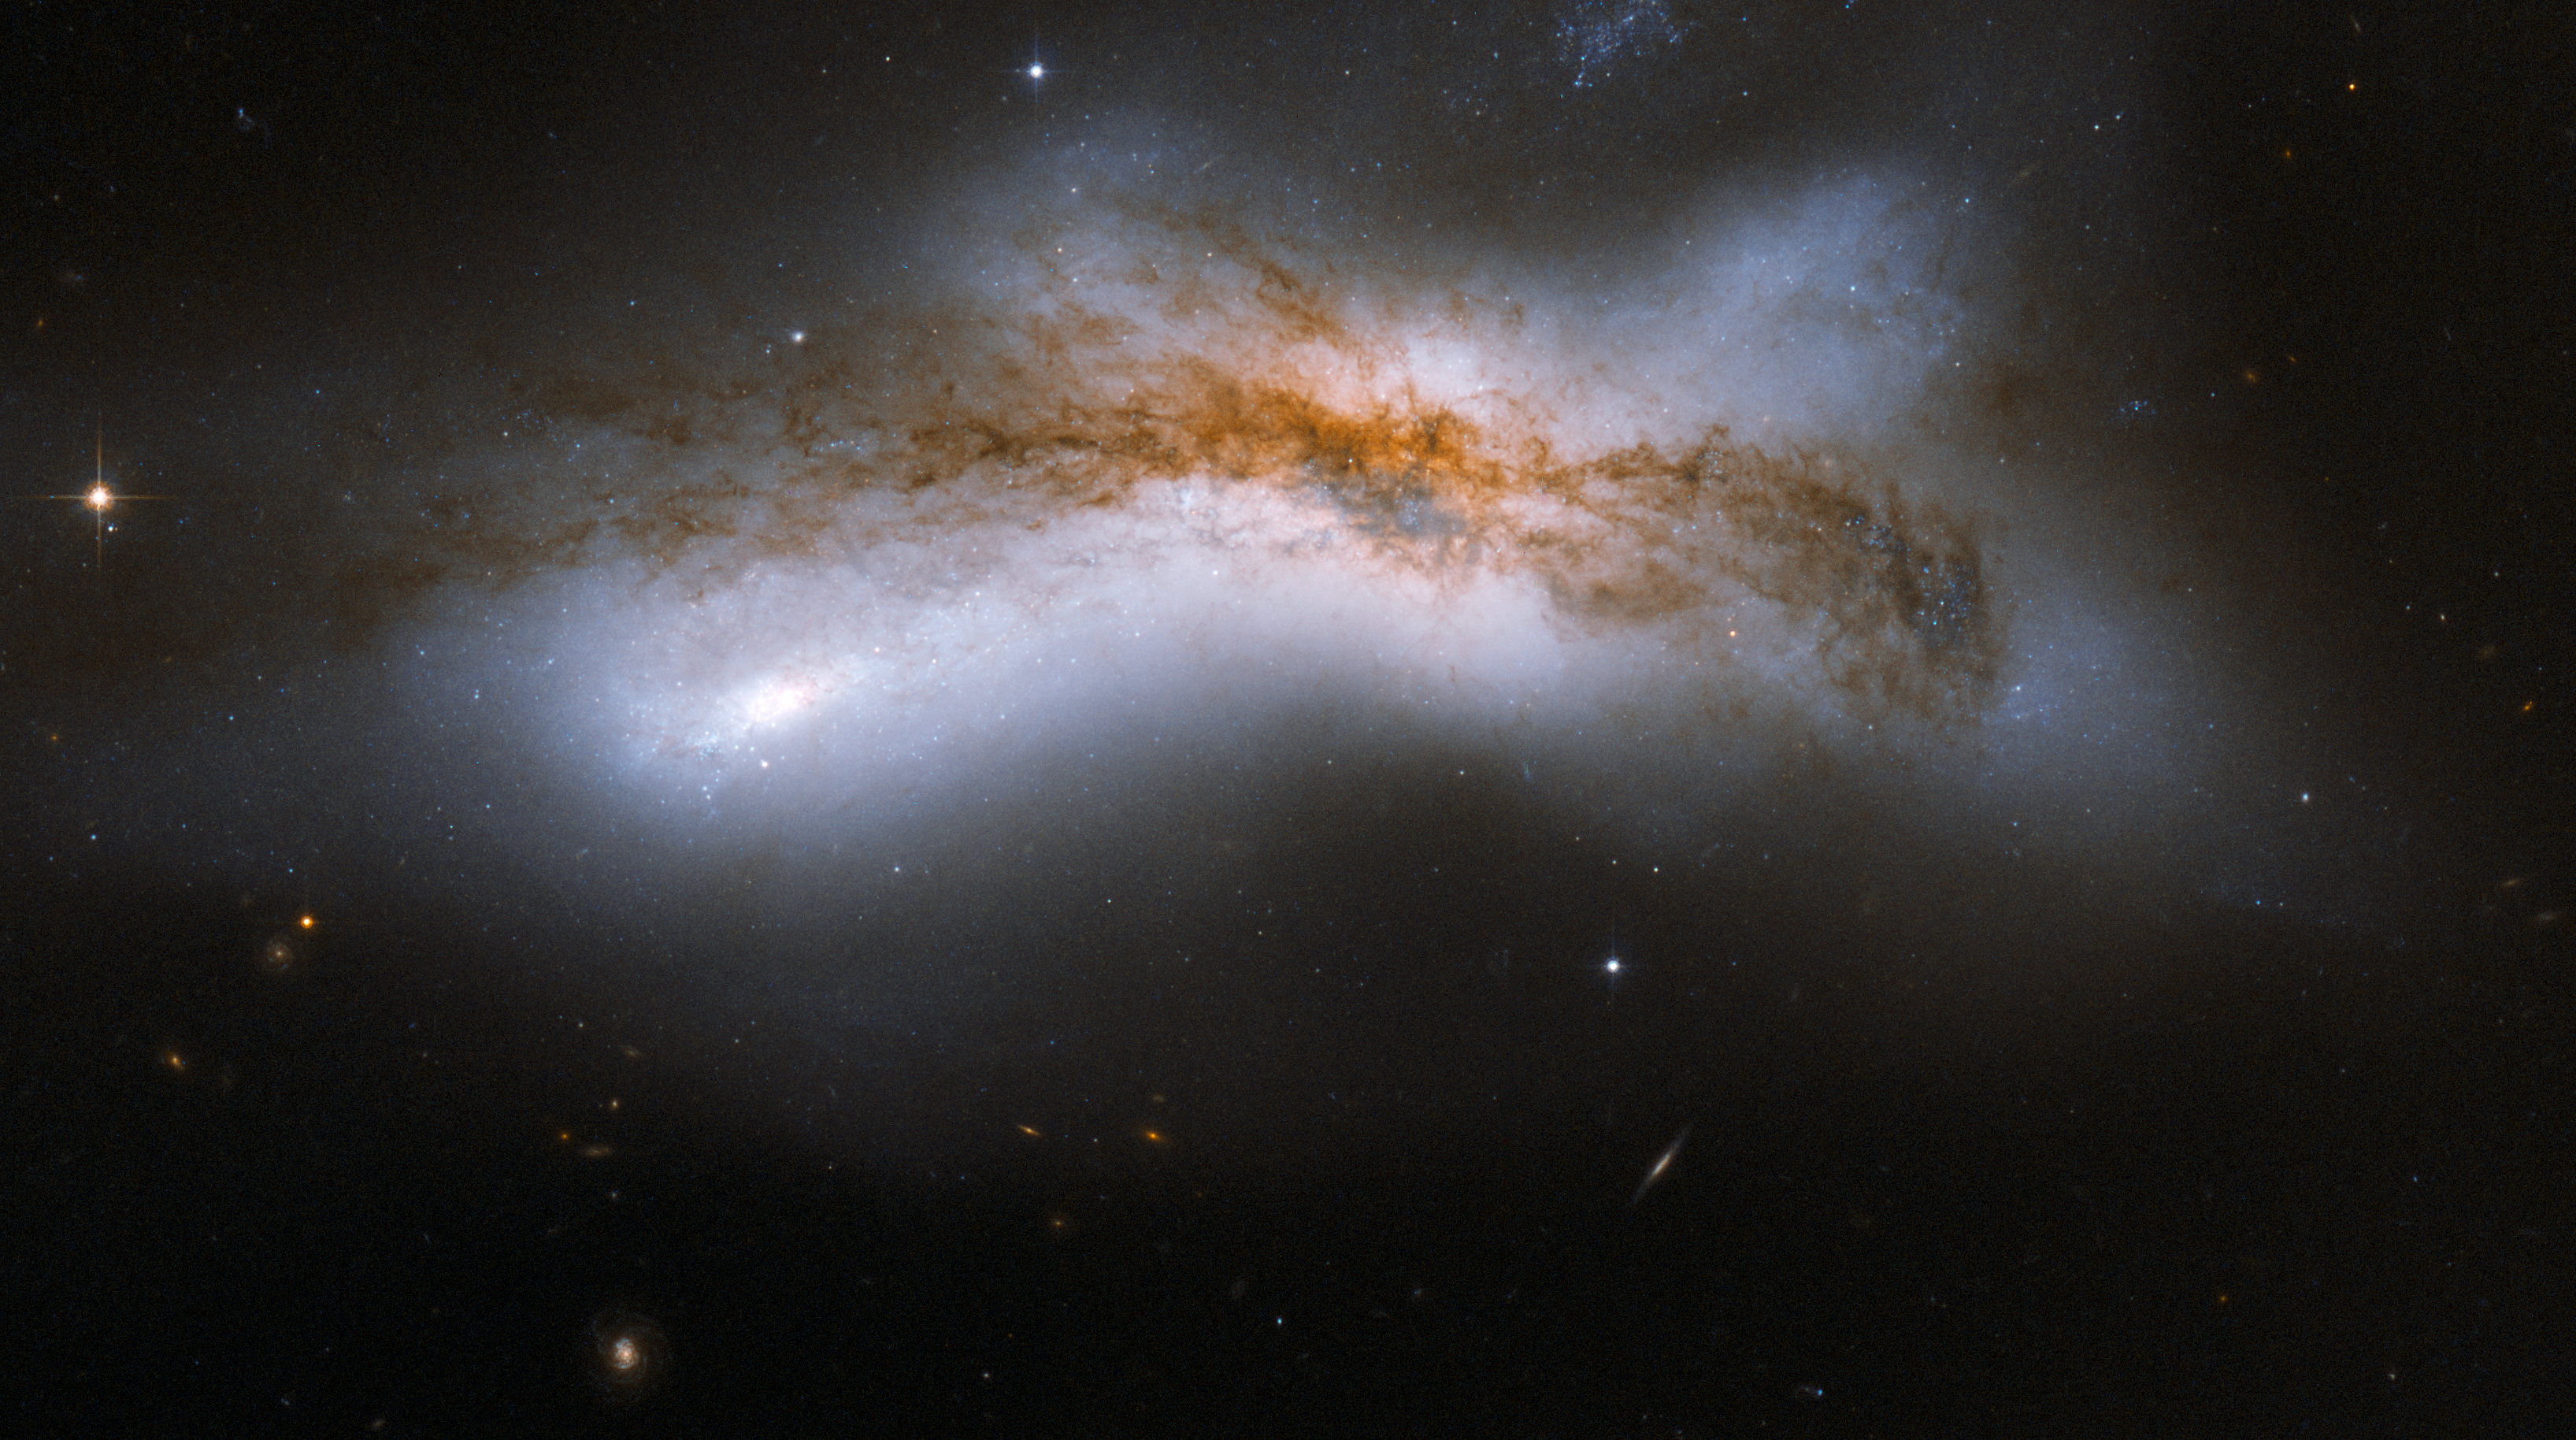

NGC 520

NGC 520 is the product of a collision between two disc galaxies that started 300 million years ago. It exemplifies the middle stages of the merging process: the discs of the parent galaxies have merged together, but the nuclei have not yet coalesced. It features an odd-looking tail of stars and a prominent dust lane that runs diagonally across the centre of the image and obscures the galaxy. NGC 520 is one of the brightest galaxy pairs on the sky, and can be observed with a small telescope toward the constellation of Pisces, the Fish, having the appearance of a comet. It is about 100 million light-years away and about 100,000 light-years across. The galaxy pair is included in Arp's catalogue of peculiar galaxies as ARP 157.

This image is part of a large collection of 59 images of merging galaxies taken by the Hubble Space Telescope and released on the occasion of its 18th anniversary on 24th April 2008.

Credit: NASA, ESA, the Hubble Heritage Team (STScI/AURA)-ESA/Hubble Collaboration and B. Whitmore (STScI)